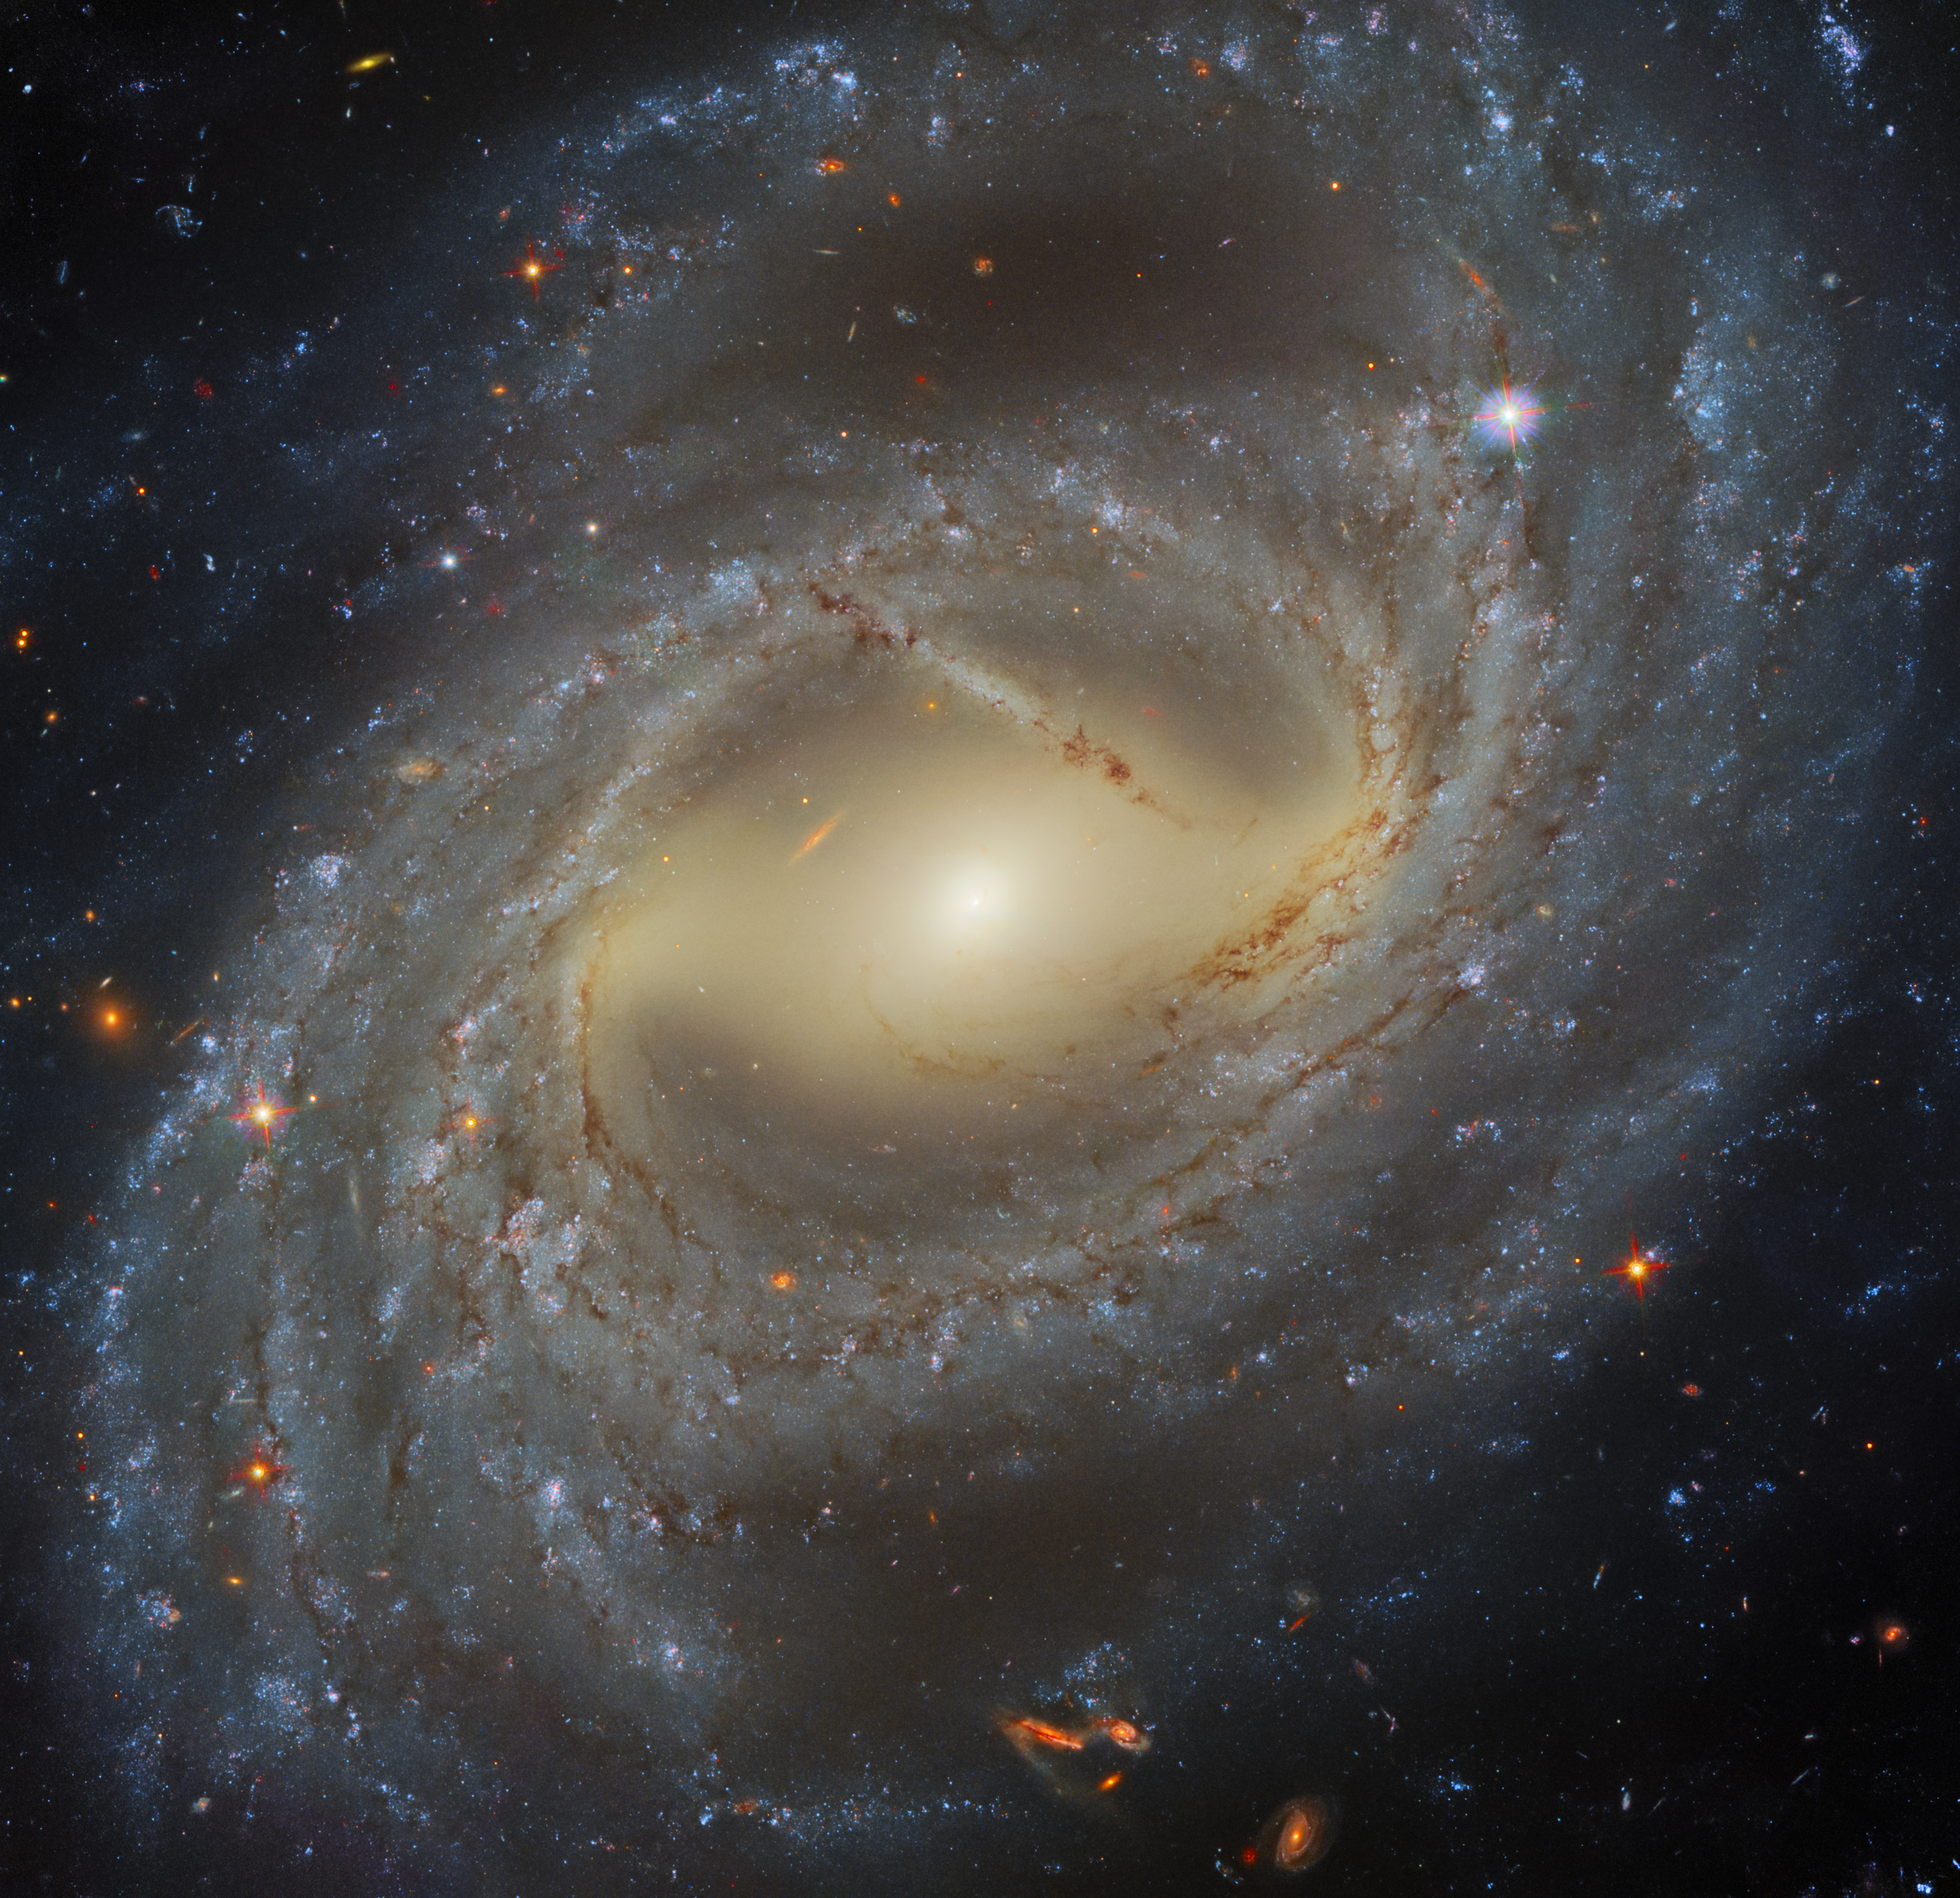

Four Filter Fusion

This stellar whirlpool is a spiral galaxy named NCG 7329, which has been imaged by Hubble’s Wide Field Camera 3 (WFC3). Creating a colourful image such as this one using a telescope such as Hubble is not as straightforward as pointing and clicking a camera. Commercial cameras will typically try to collect as much light of all visible wavelengths as they can, in order to create the most vibrant images possible. In contrast, raw images collected by Hubble are always monochromatic, because astronomers typically want to capture very specific ranges of wavelengths of light at any time, in order to do the best, most accurate science possible. In order to control which wavelengths of light will be collected, Hubble’s cameras are equipped with a wide variety of filters, which only allow certain wavelengths of light to reach the cameras’ CCDs (a CCD is a camera’s light sensor — phone cameras also have CCDs!).

How are the colourful Hubble images possible given that the raw Hubble images are monochromatic? This is accomplished by combining multiple different observations of the same object, obtained using different filters. This image, for example, was processed from Hubble observations made using four different filters, each of which spans a different region of the light spectrum, from the ultraviolet to optical and infrared. Specialised image processors and artists can make informed judgements about which optical colours best correspond to each filter used. They can then colour the images taken using that filter accordingly. Finally, the images taken with different filters are stacked together, and voila! The colourful image of a distant galaxy is complete, with colours as representative of reality as possible.

Credit: ESA/Hubble & NASA, A. Riess et al.